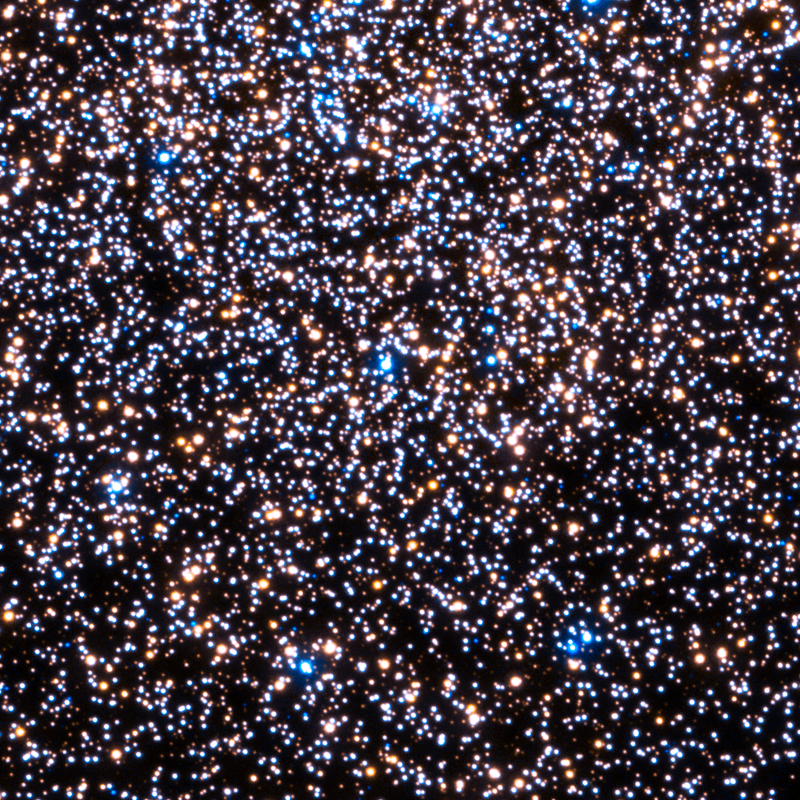

Central regions of 47 Tucanae seen in the ultraviolet

This NASA/ESA Hubble Space Telescope image shows the central region of a globular cluster known as NGC 104 — or, more commonly, 47 Tucanae, since it is part of the constellation of Tucana (The Toucan) — seen in ultraviolet light.

Using the ultraviolet capabilities of Hubble’s sharp-eyed Wide Field Camera 3, the astronomers traced populations of white dwarfs with a range of ages and positions. This made it possible, for the first time, to collect a census of young white dwarf stars beginning their migration from the crowded centre of an ancient star cluster to its less populated outskirts.

Credit: NASA, ESA, and H. Richer and J. Heyl (University of British Columbia, Vancouver)